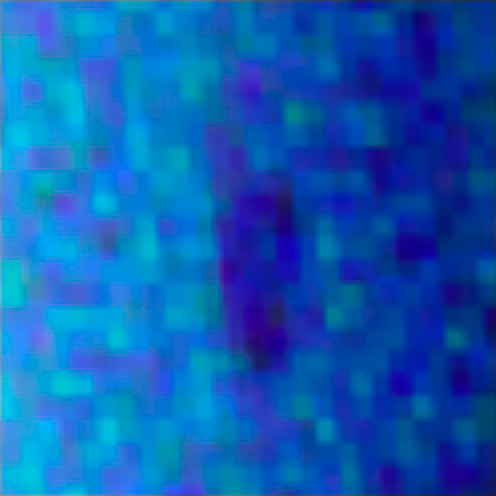

Uranus Dark Spot (Magnified View)

This image shows a dark spot on the surface of Uranus. This dark spot is a vortex measuring 1,100 miles by 1,900 miles — large enough to engulf two-thirds of the United States — and was caused by churning winds in the planet's atmosphere.

For a zoomed out image look here.

Credit: NASA, ESA, L. Sromovsky and P. Fry (University of Wisconsin), H. Hammel (Space Science Institute), and K. Rages (SETI Institute)